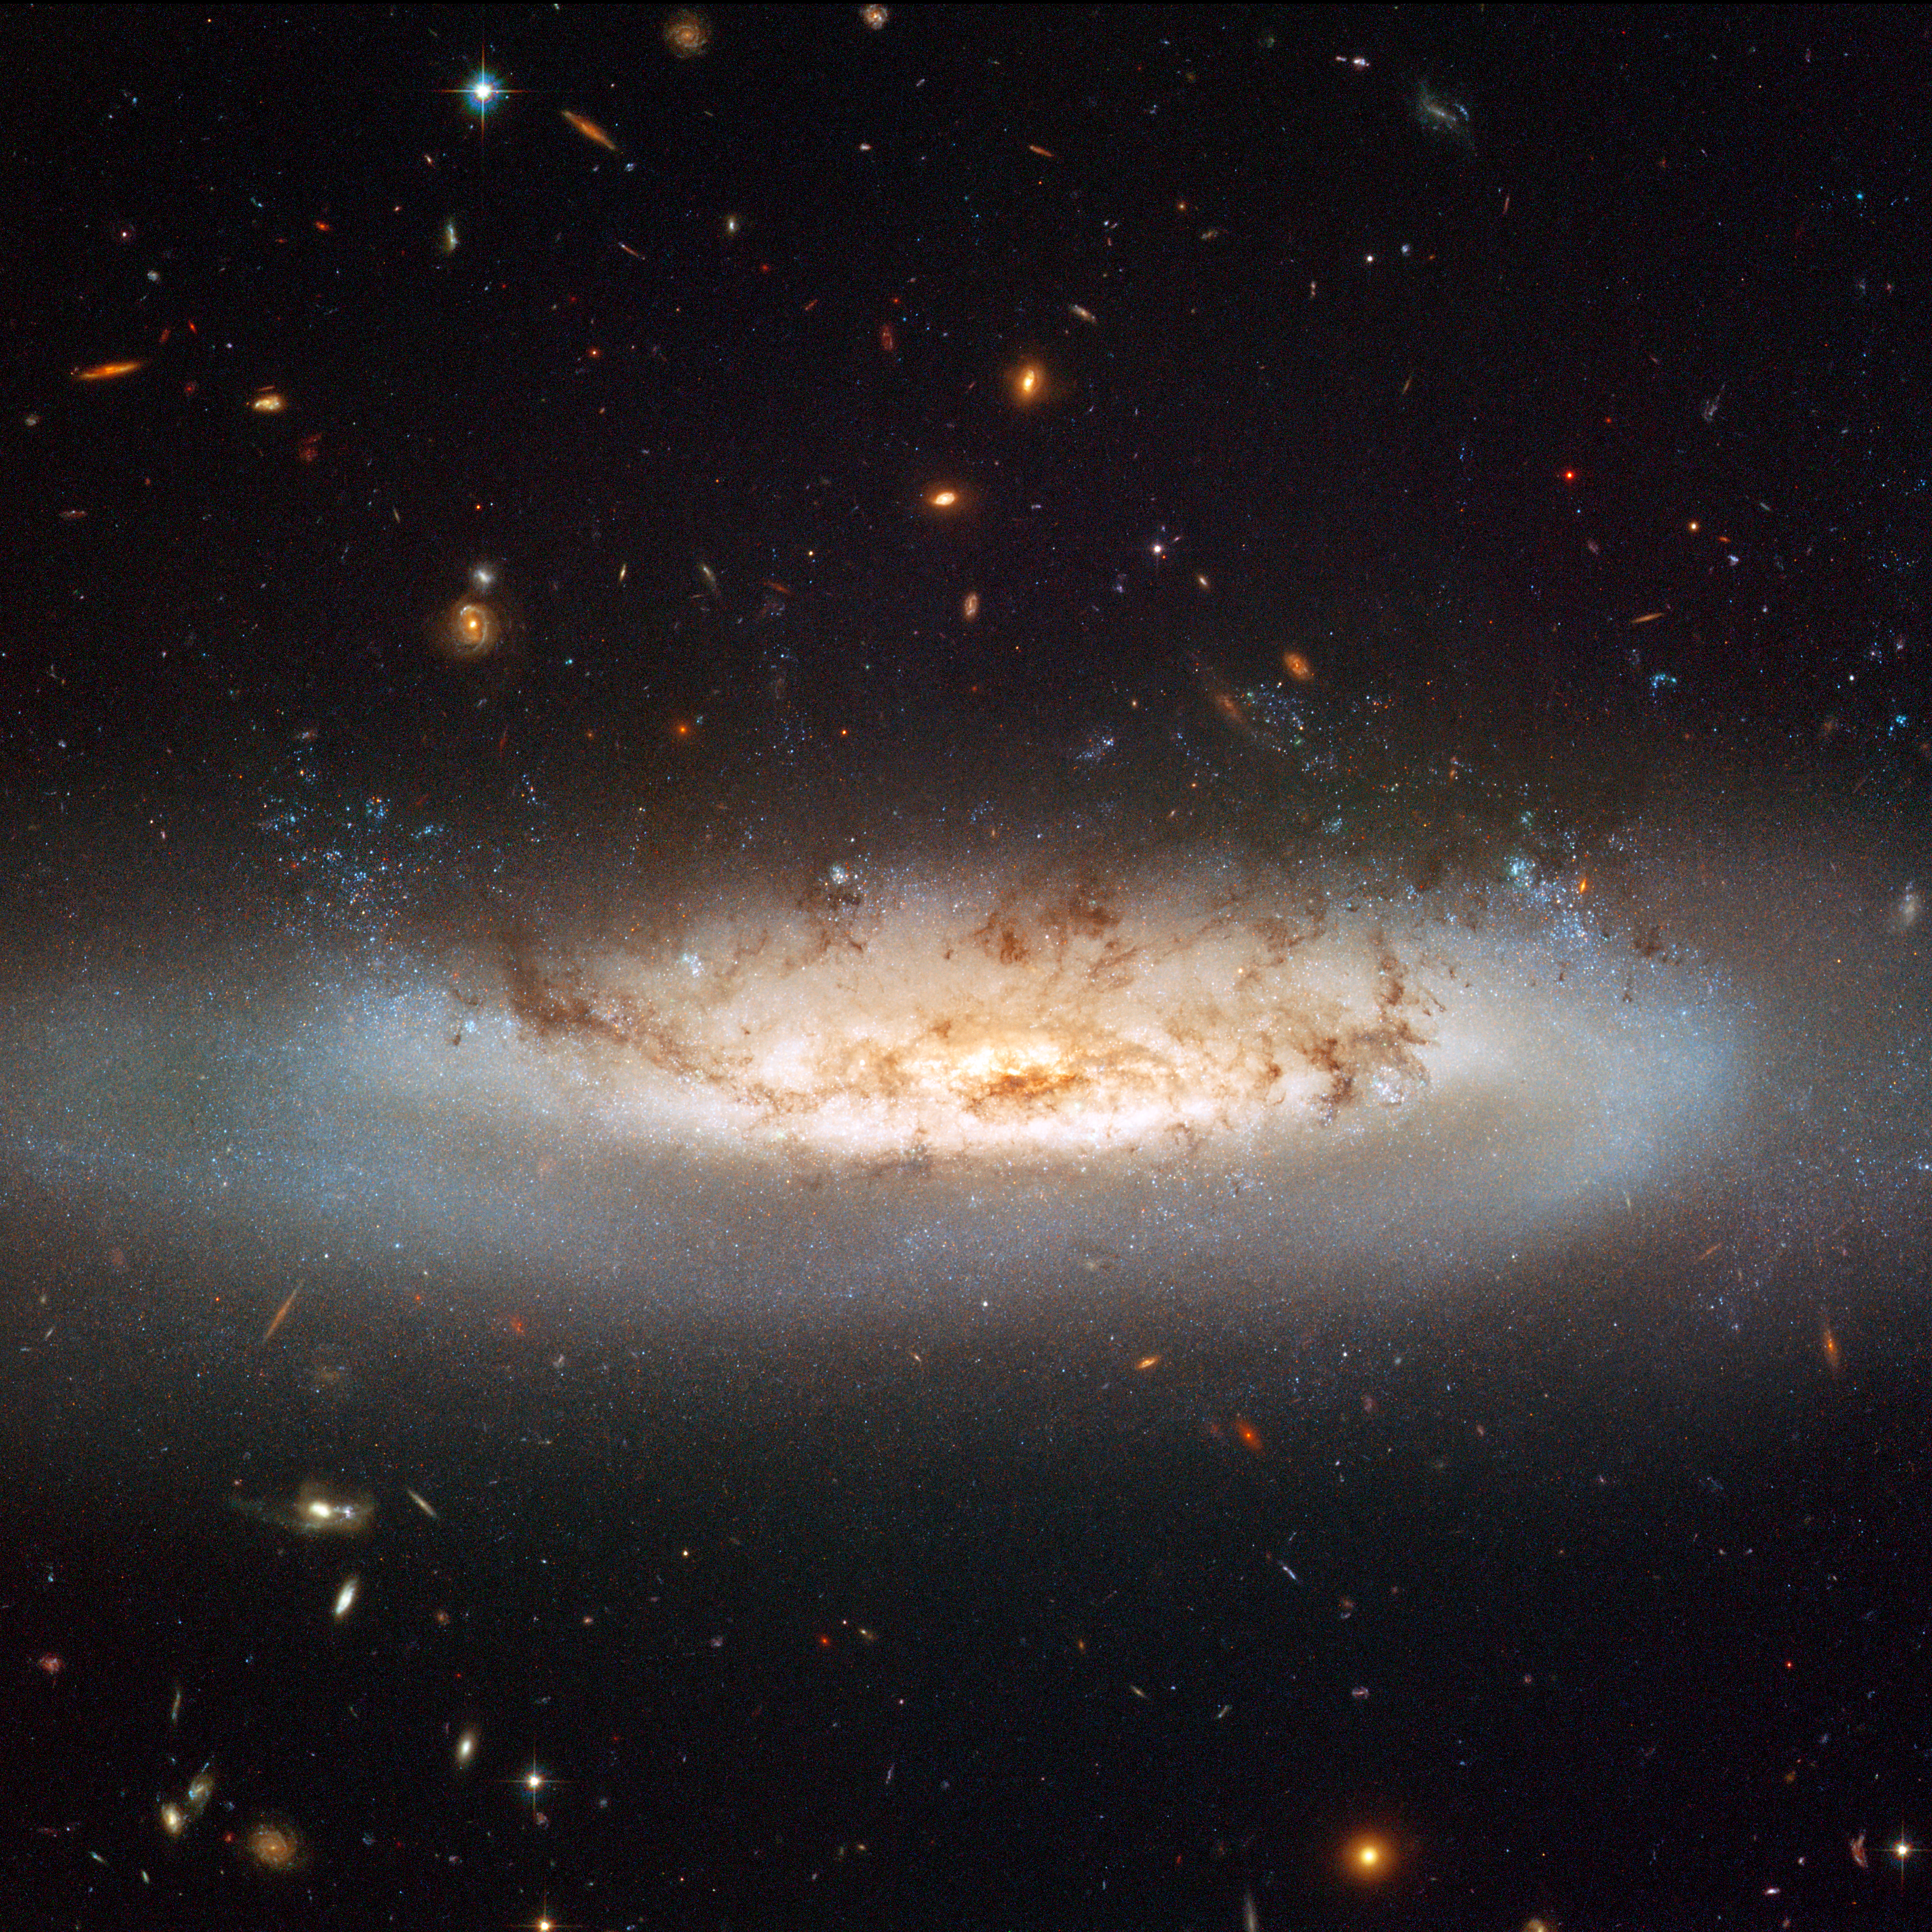

Hubble views NGC 4522

Hubble's Advanced Camera for Surveys (ACS) allows astronomers to study an interesting and important phenomenon called ram pressure stripping that is so powerful, it is capable of mangling galaxies and even halting their star formation.

NGC 4522 is a spectacular example of a spiral galaxy that is currently being stripped of its gas content. The galaxy is part of the Virgo galaxy cluster and its rapid motion within the cluster results in strong winds across the galaxy as the gas within is left behind. Scientists estimate that the galaxy is moving at more than 10 million kilometres per hour. A number of newly formed star clusters that developed in the stripped gas can be seen in the Hubble image. The stripped spiral galaxy is located some 60 million light-years away from Earth.

Even though it is a still image, Hubble's view of NGC 4522 practically swirls off the page with apparent movement. It highlights the dramatic state of the galaxy with an especially vivid view of the ghostly gas being forced out of it. Bright blue pockets of new star formation can be seen to the right and left of centre.

Credit: NASA & ESA